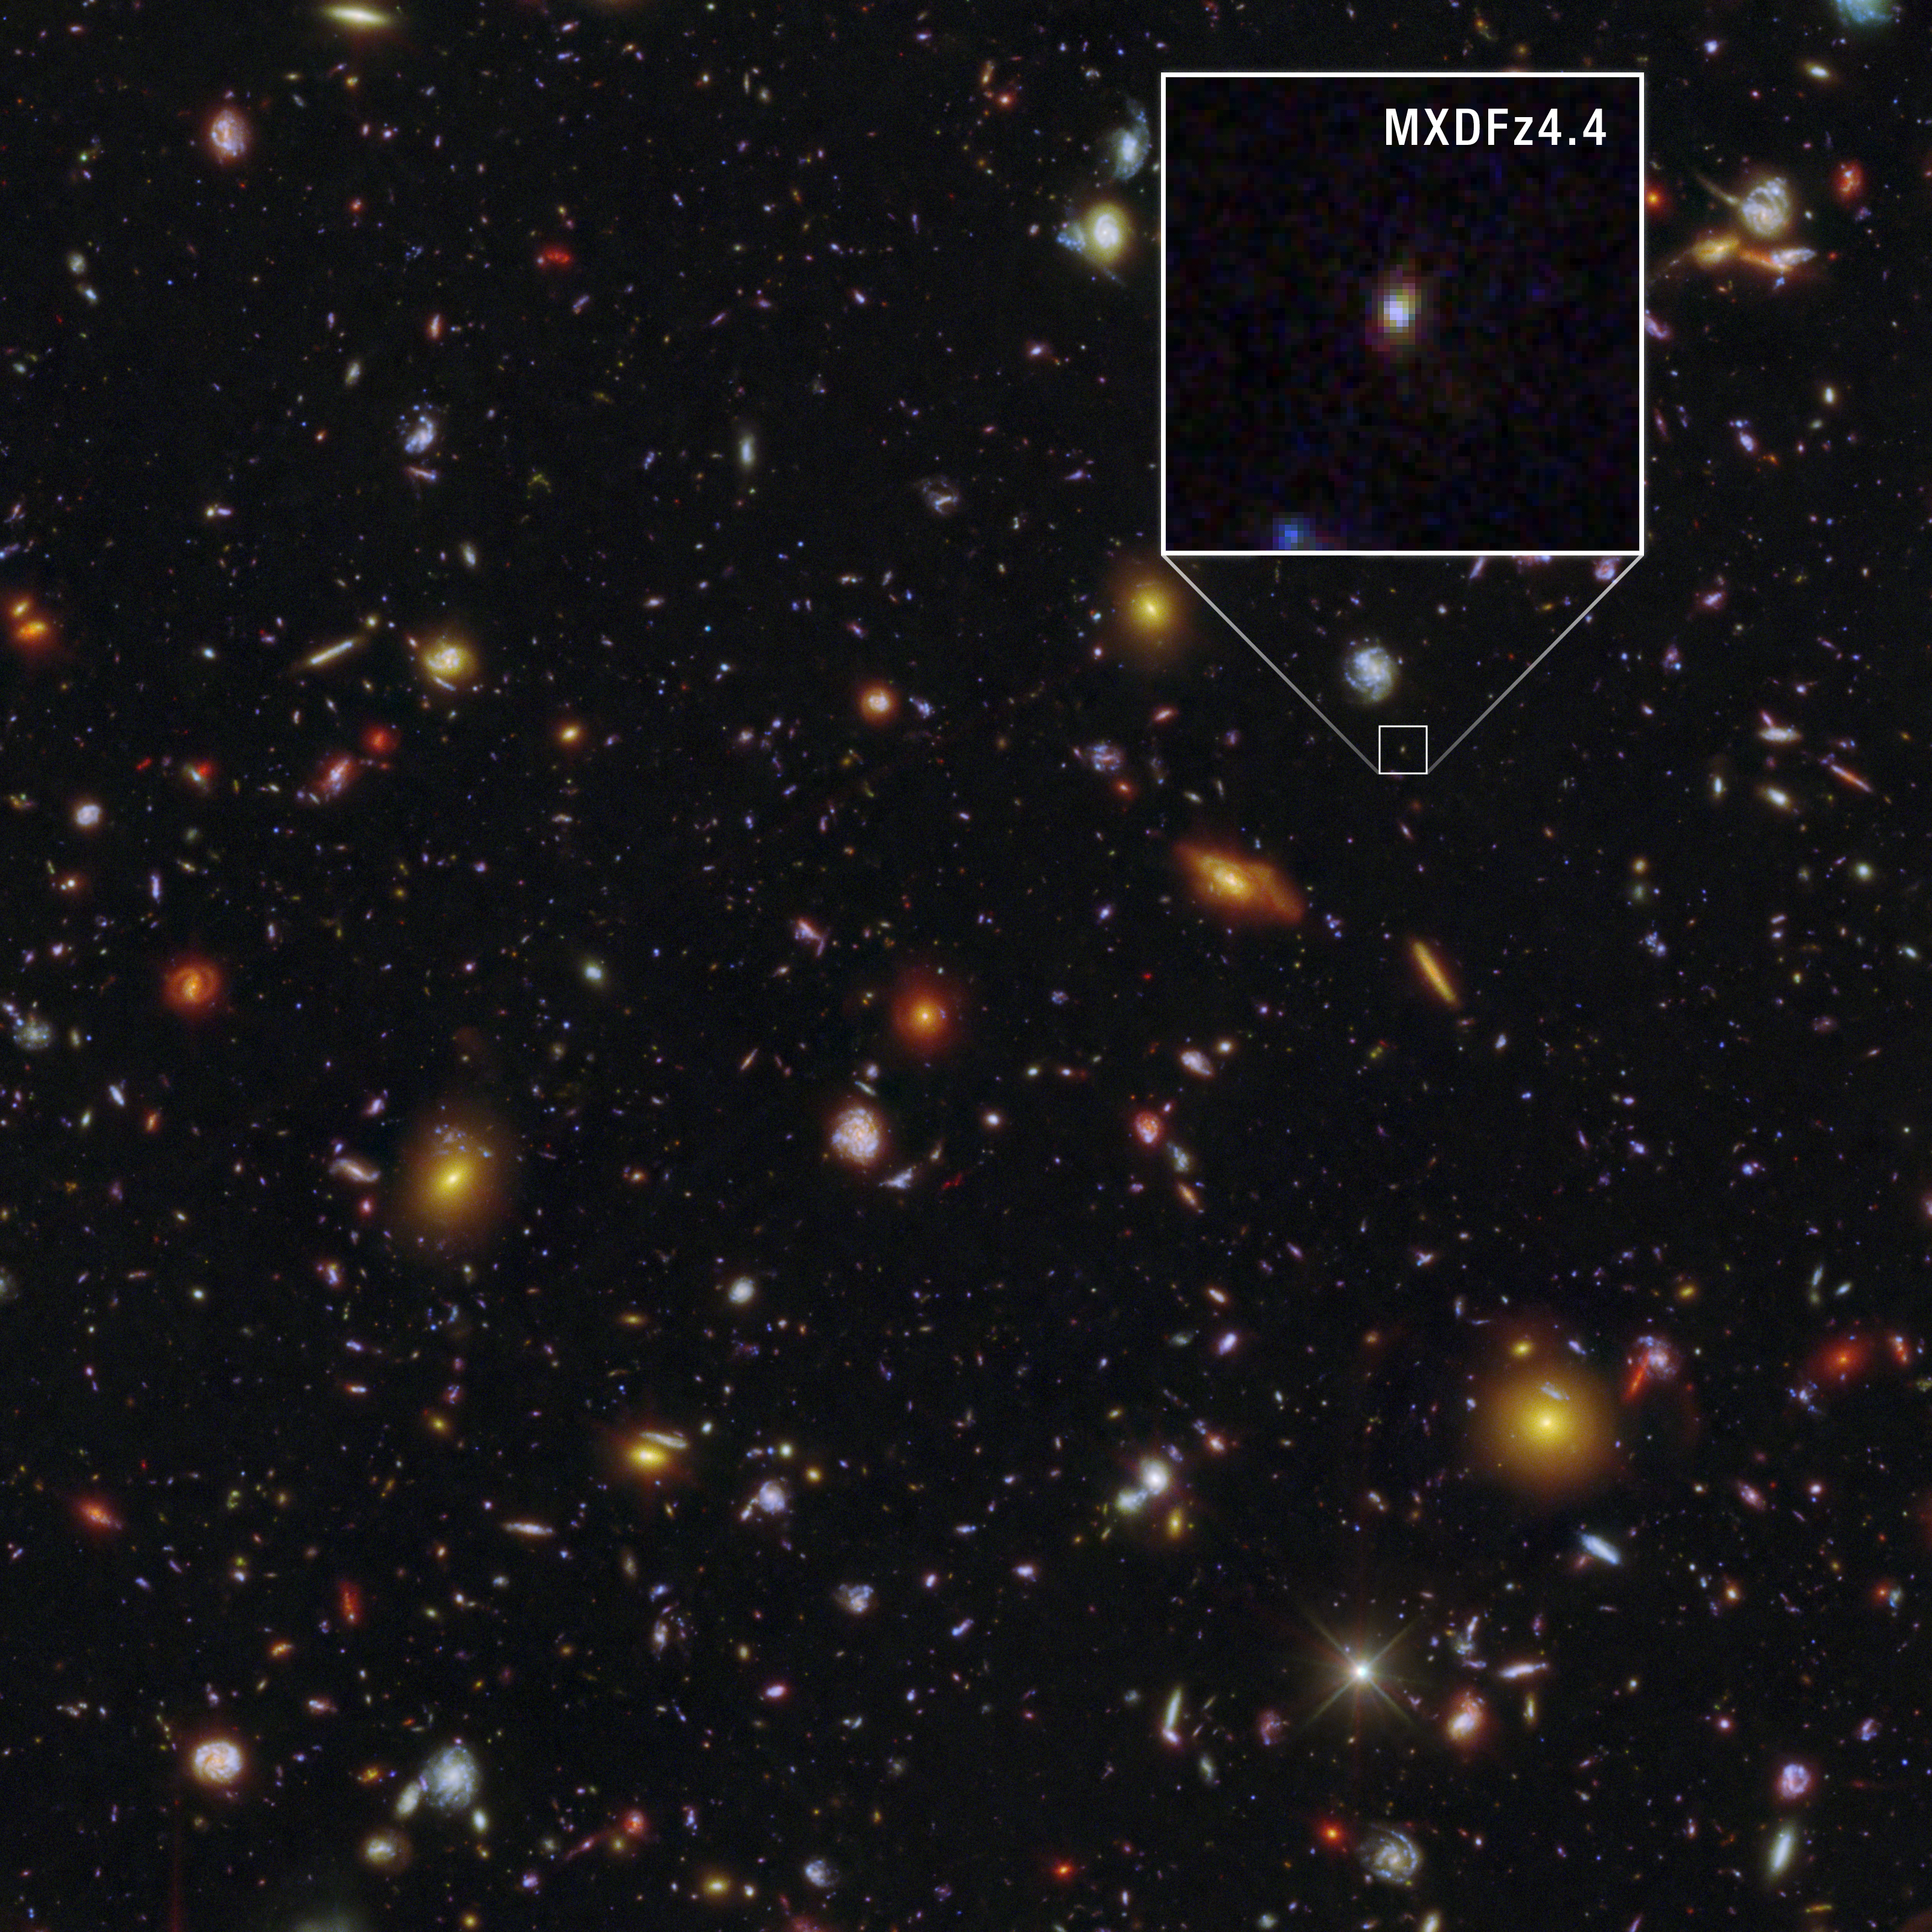

Galactic pioneer MXDFz4.4 (annotated Hubble and Webb image)

This shows the galaxy MXDFz4.4, enlarged at right, in the Hubble Ultra Deep Field (HUDF), captured by both the NASA/ESA Hubble Space Telescope’s Advanced Camera for Surveys (ACS) and the NASA/ESA/CSA James Webb Space Telescope’s NIRCam (Near-Infrared Camera).

Oddball galaxy MXDFz4.4 existed only 1.4 billion years after the Big Bang, when the Universe was still a “swirl” of opaque and clear gas as the Era of Reionisation was ending.

Detailed visible-light images from the NASA/ESA Hubble Space Telescope revealed that several bursts of younger stars cleared the space in and around the galaxy. The team sifted through extensive Hubble observations that produced deep exposures of the field where this galaxy is located.

The colour assignments in the image emphasise the specific wavelengths of light Hubble observed where ionising photons from MXDFz4.4 were detected, which transformed the gas around them from opaque to clear.

Researchers have long sought evidence to explain how the Universe transitioned from foggy to transparent — and Hubble has provided the first example this close to the era of reionisation of how that might have happened within an individual galaxy.

Credit: NASA, ESA, STScI, I. Goovaerts, M. Rafelski, A. Koekemoer (STScI). Image Processing: A. Pagan (STScI)